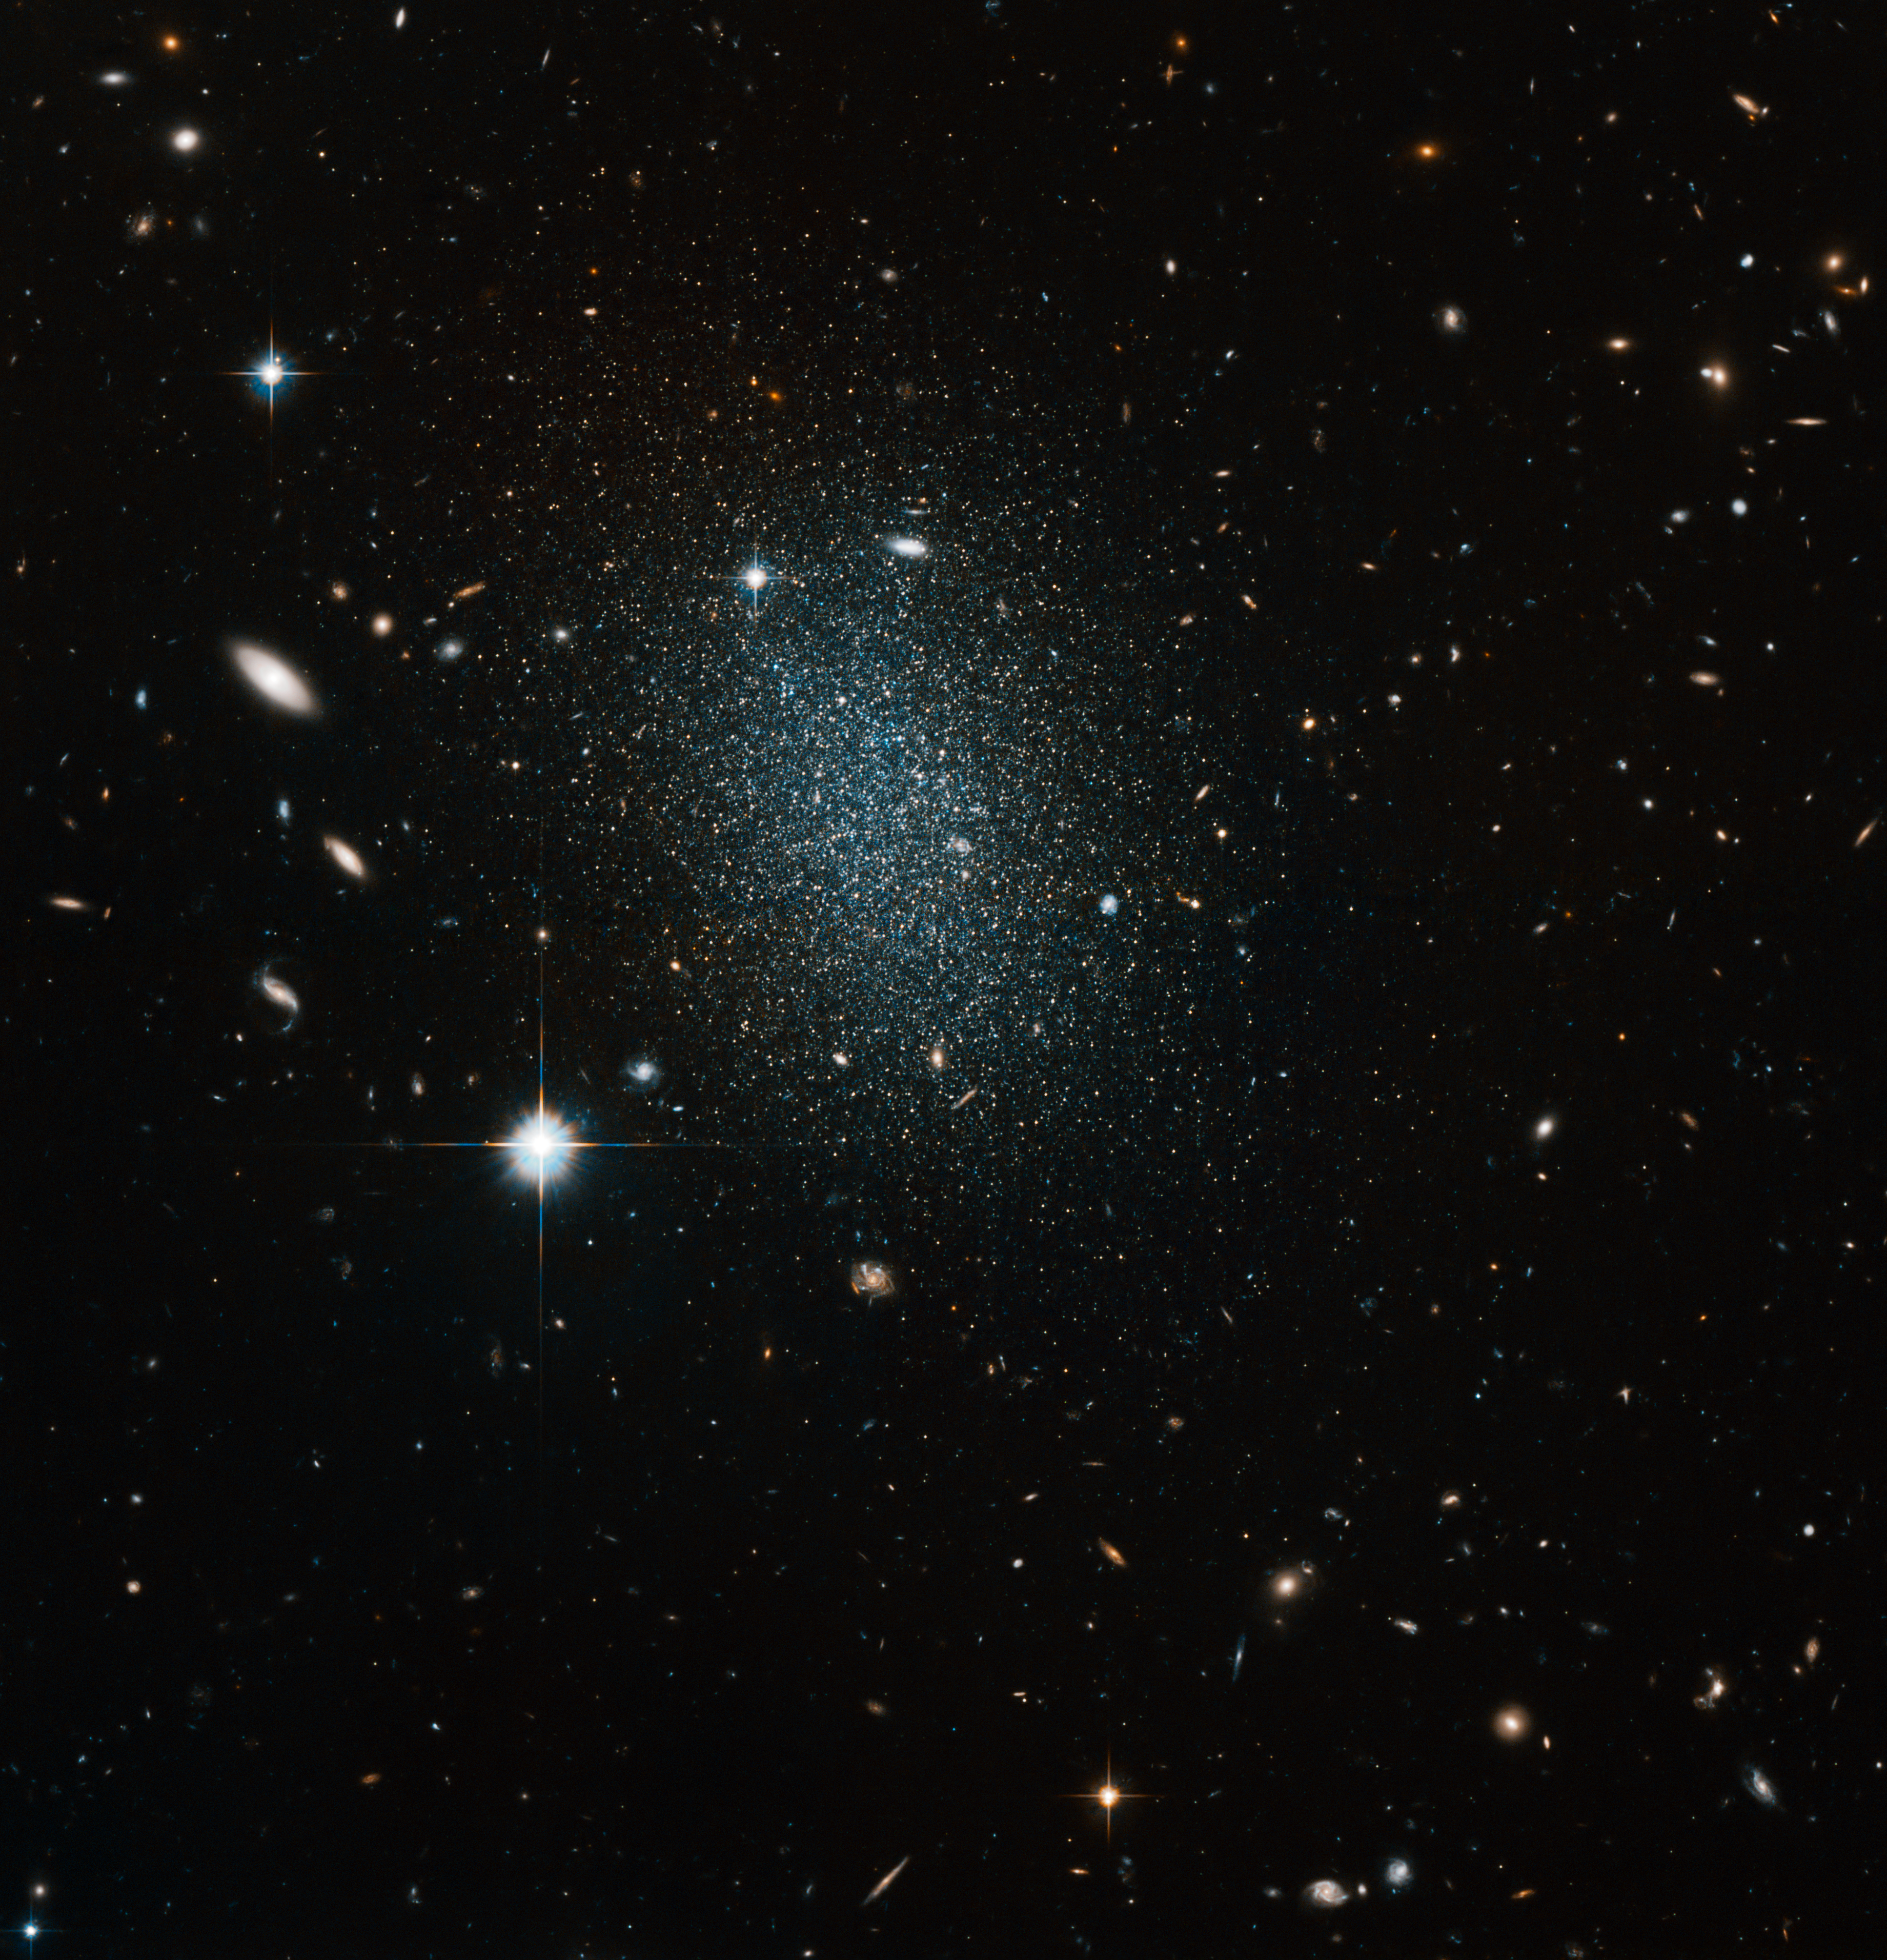

Astronomical vision test

Peering into the depths of space, the sharp-eyed NASA/ESA Hubble Space Telescope has imaged the nearby but faint dwarf galaxy ESO 540-030. This object itself appears as a huge swarm of dim stars, but ESO 540-030 is actually just one point of interest in the picture.

ESO 540-030 is just over 11 million light-years distant, and is part of the Sculptor group of galaxies. This collection is the closest neighbour to our own Local Group of galaxies that includes the Milky Way. Due to its proximity the Sculptor group contains some of the brightest galaxies in the southern skies, although ESO 540-030 is not one of these; dwarf galaxies generally have low surface brightness, which make observations difficult.

Hubble has captured a snapshot of galaxy types in the background, with spirals, barred spirals, ellipticals and irregulars on display. Careful examination of this picture should allow examples of each galaxy type to be found. Some galaxies lie directly behind ESO 540-030, increasing the challenge. As well as the galaxies there are also five bright stars, which are much closer to us than the galaxies. The telltale diffraction spikes — four sharp lines of light emanating at 90 degree angles, caused by light diffracting in the telescope — are unmistakable signs of the stars in the picture.

Cataloguing galaxy types is an important task for scientists attempting to understand more about how our Universe evolved. Our own eyes are excellent tools for this, as participants of the Galaxy Zoo Hubble project will confirm [1].

This picture was created from images taken with the Wide Field Channel of Hubble’s Advanced Camera for Surveys. Images through a yellow-orange filter (F606W, coloured blue) were combined with images taken in the near-infrared (F814W, coloured red). The total exposure times were 4480 s and 3360 s, respectively and the field of view is about 3.1 arcminutes across.

Credit: ESA/Hubble & NASA